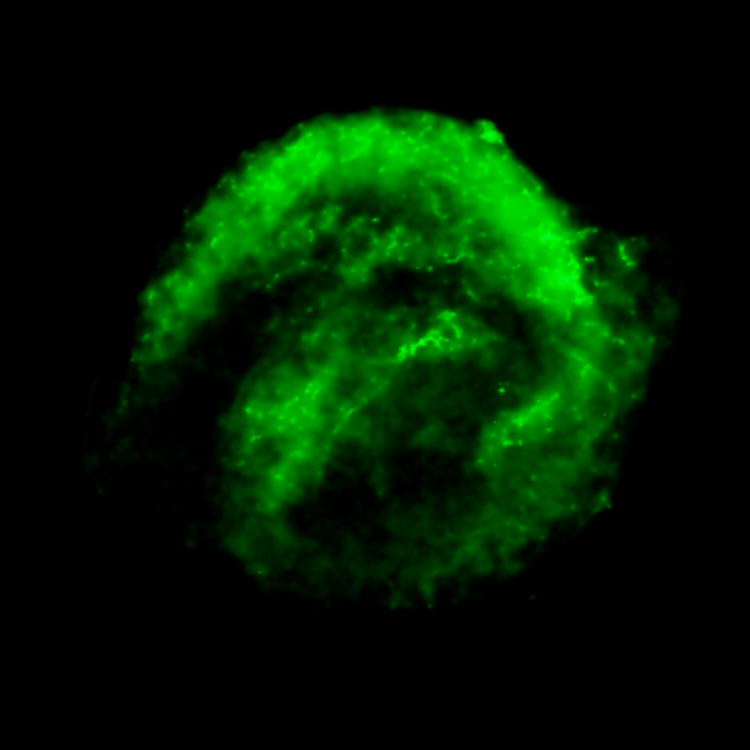

Chandra X-ray Observatory Data of Kepler's Supernova Remnant

This image shows the remains of Kepler's Supernova, the most recent exploding star to be seen in the Milky Way Galaxy. It was first observed 400 years ago when it was thought to be 'a new star'. In fact, it was the the gas and dust from an exploding star, rapidly expanding. These remnants have now reached a diameter of 14 light years wide and are still expanding at 4 million miles per hour.

This image was taken by the Chandra X-ray Observatory and shows the cooler X-ray gas which resides in a thick interior shell and marks the location of heated material expelled from the exploded star.

Credit: NASA, ESA, R. Sankrit and W. Blair (Johns Hopkins University)